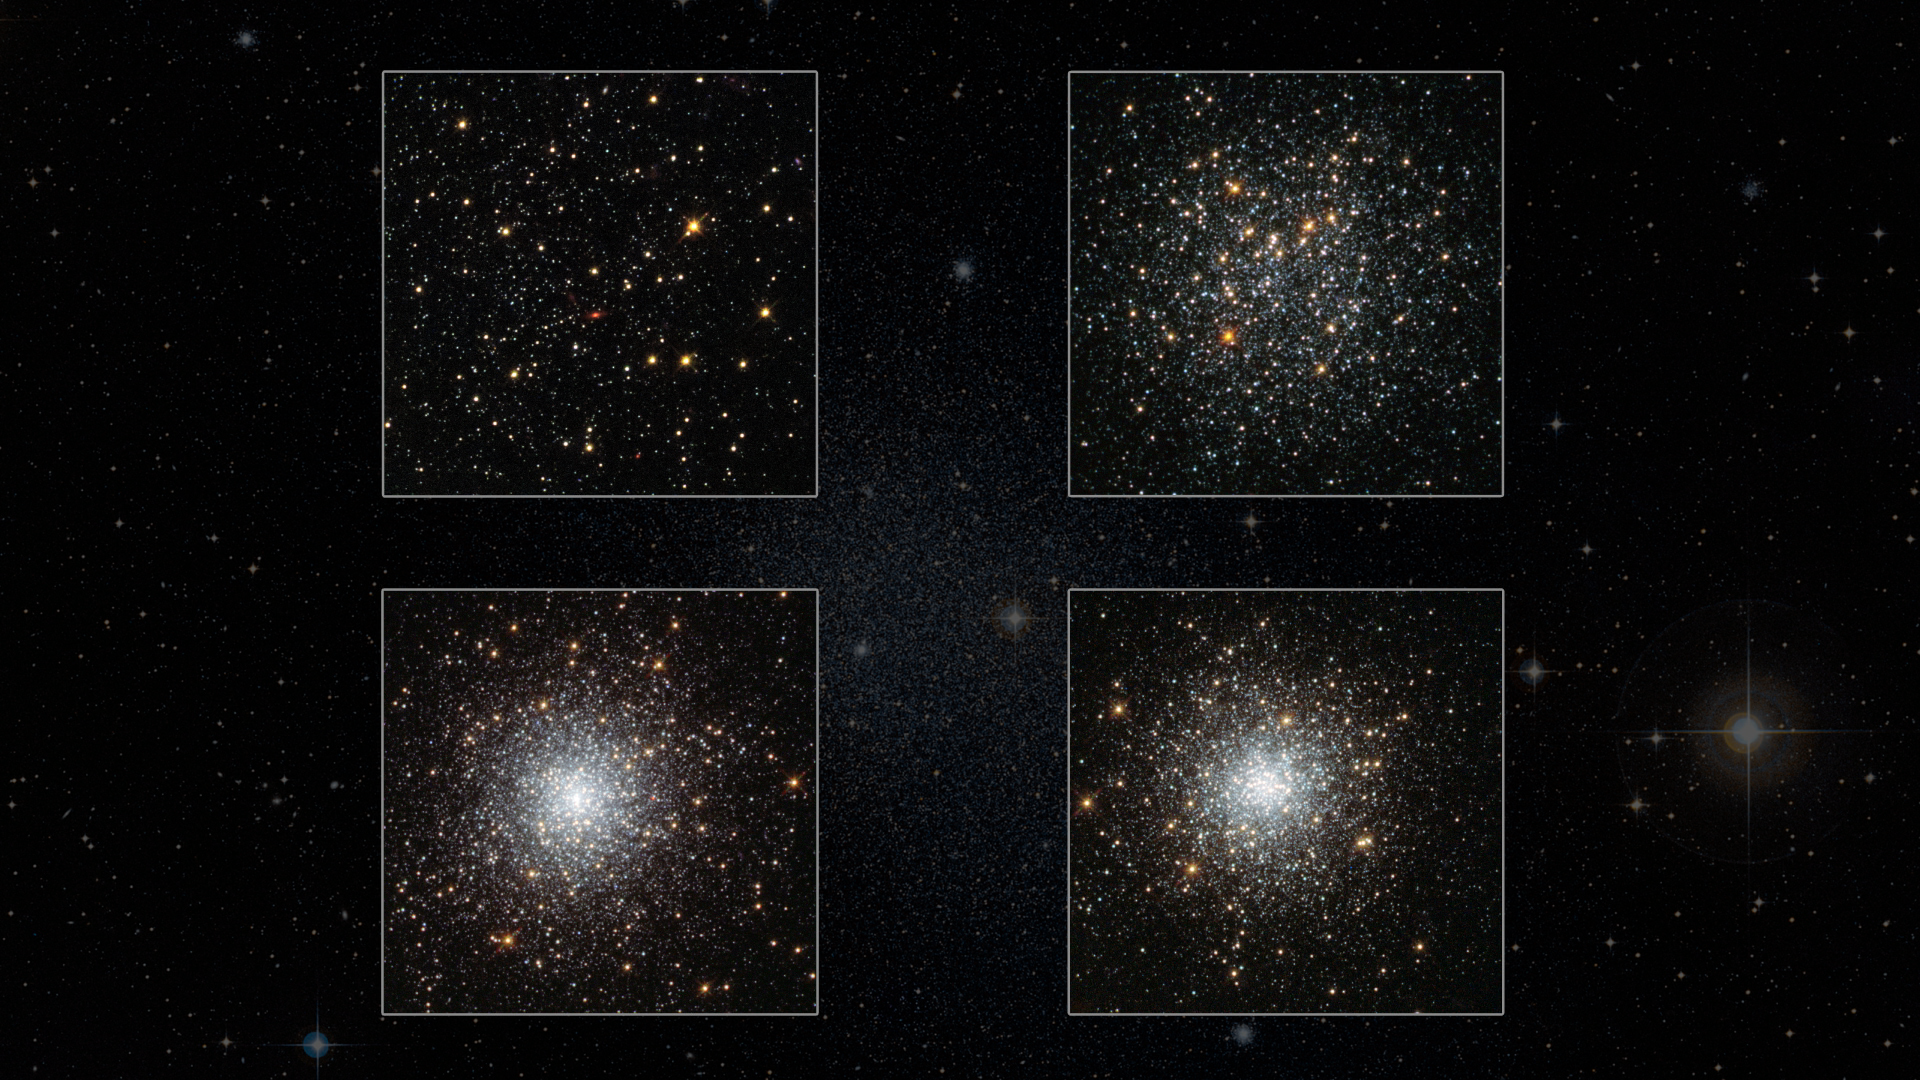

Screenshot from: Hubblecast 80: The Riddle of the Missing Stars

This image is a screenshot from Hubblecast 80: The Riddle of the Missing Stars

Credit: NASA, ESA/Hubble